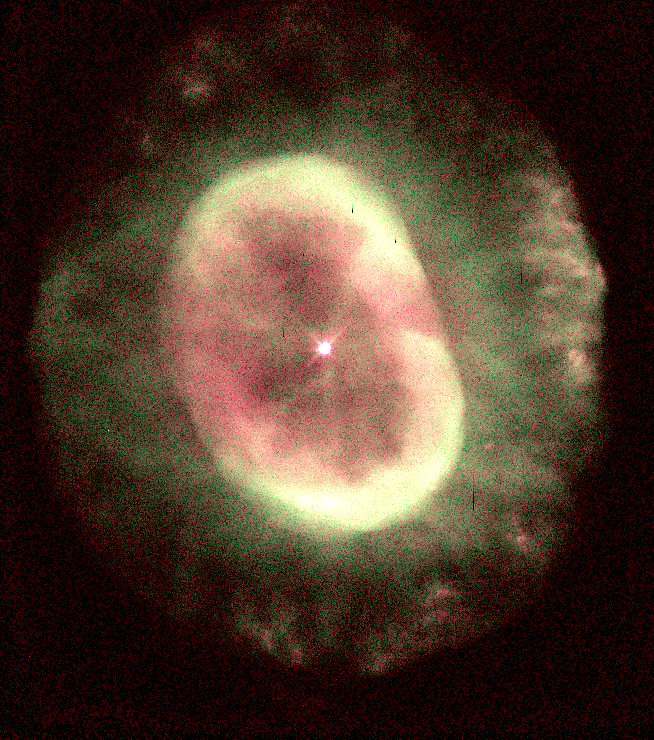

NGC 7662

This image is a part of the Hubble Gallery of Planetary Nebulae.

Credit: Howard Bond (ST ScI) and NASA/ESA